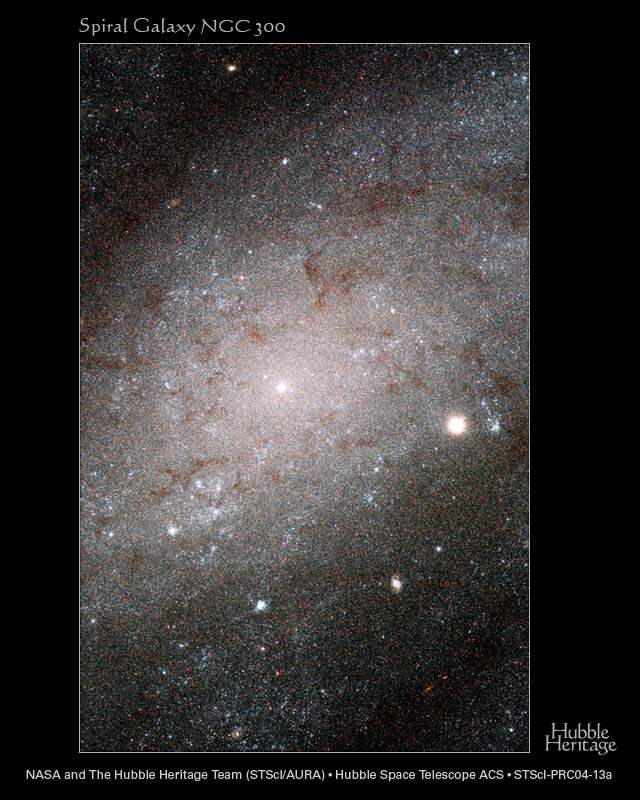

Hubble sees stars as numerous as grains of sand in nearby galaxy

Myriads of stars embedded in the heart of the nearby galaxy NGC 300 can be singled out like grains of sand on a beach in this Hubble Space Telescope image. The Hubble telescope's exquisite resolution enables it to see the stars as individual points of light, despite the fact that the galaxy is millions of light-years away.

NGC 300 is a spiral galaxy similar to our own Milky Way galaxy. It is a member of a nearby group of galaxies known as the Sculptor group, named for the southern constellation where the group can be found. The distance to NGC 300 is 6.5 million light-years, making it one of the Milky Way's closer neighbors. At this distance, only the brightest stars can be picked out from ground-based images. With a resolution some 10 times better than ground-based telescopes, Hubble's Advanced Camera for Surveys (ACS) resolves many more stars in this galaxy than can be detected from the ground.

The colour composite was made from filtered images taken in blue, green, and infrared light. Hot, young blue stars appear in clusters that form in the galaxy's spiral arms. Ribbons of deep red stars mark the location of gauzy curtains of dust that partially hide the light of the stars behind them. Near the center of the image is the bright and compact nucleus of the galaxy where even the ACS loses the ability to separate the densely packed stars.

The individual exposures that were combined to make this new image were taken in July and September 2002. These Hubble data are being used to test a new method for measuring distances to galaxies and to compare it with the more traditional methods, such as the period-luminosity relationship of pulsating stars known as Cepheid variables. Measuring distances is a perpetual but important concern for astronomers.

Some of the luminous blue specks in this image, young and massive stars called blue supergiants, are among the brightest stars seen in spiral galaxies like NGC 300. By combining the stellar brightness with other information, such as the stellar temperature, surface gravity and mass outflow, astronomers are defining a new technique to measure distances to galaxies located millions of light-years away.

Credit: NASA, ESA, and The Hubble Heritage Team (AURA/STScI)